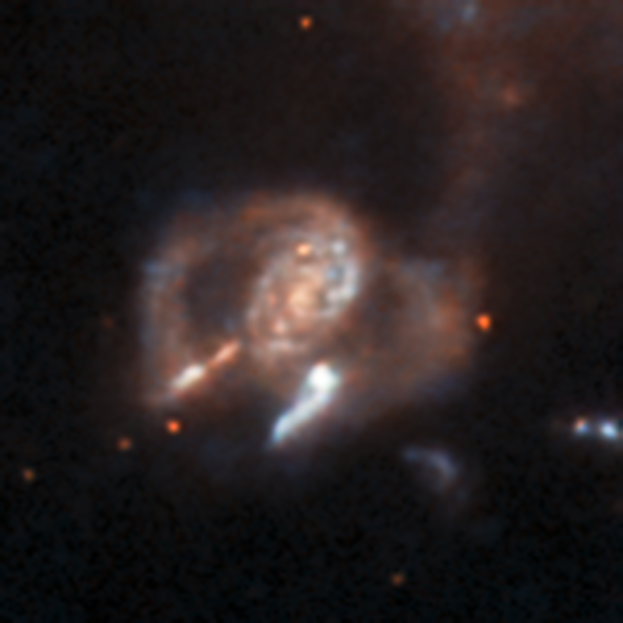

An anomaly from Hubble’s archive — Unknown object

This is a previously-undiscovered astrophysical anomaly, found in the Hubble Space Telescope’s archive by researchers using a new AI-assisted method. The AI tool allowed them to sift through nearly 100 million image cutouts in just days, turning up rare and anomalous objects like this one.

The strange, bi-polar galaxy seen here is certainly anomalous, with its compact, swirling core and two open lobes at the sides. Exactly what kind of galaxy it is is unclear, and it was not previously known to astronomers. It’s an example of the kinds of new and unusual finds that can be made by AI-assisted data processing, even from well-known datasets.

Read more about this new research here.

Credit: ESA/Hubble & NASA, D. O’Ryan, P. Gómez (European Space Agency), M. Zamani (ESA/Hubble)